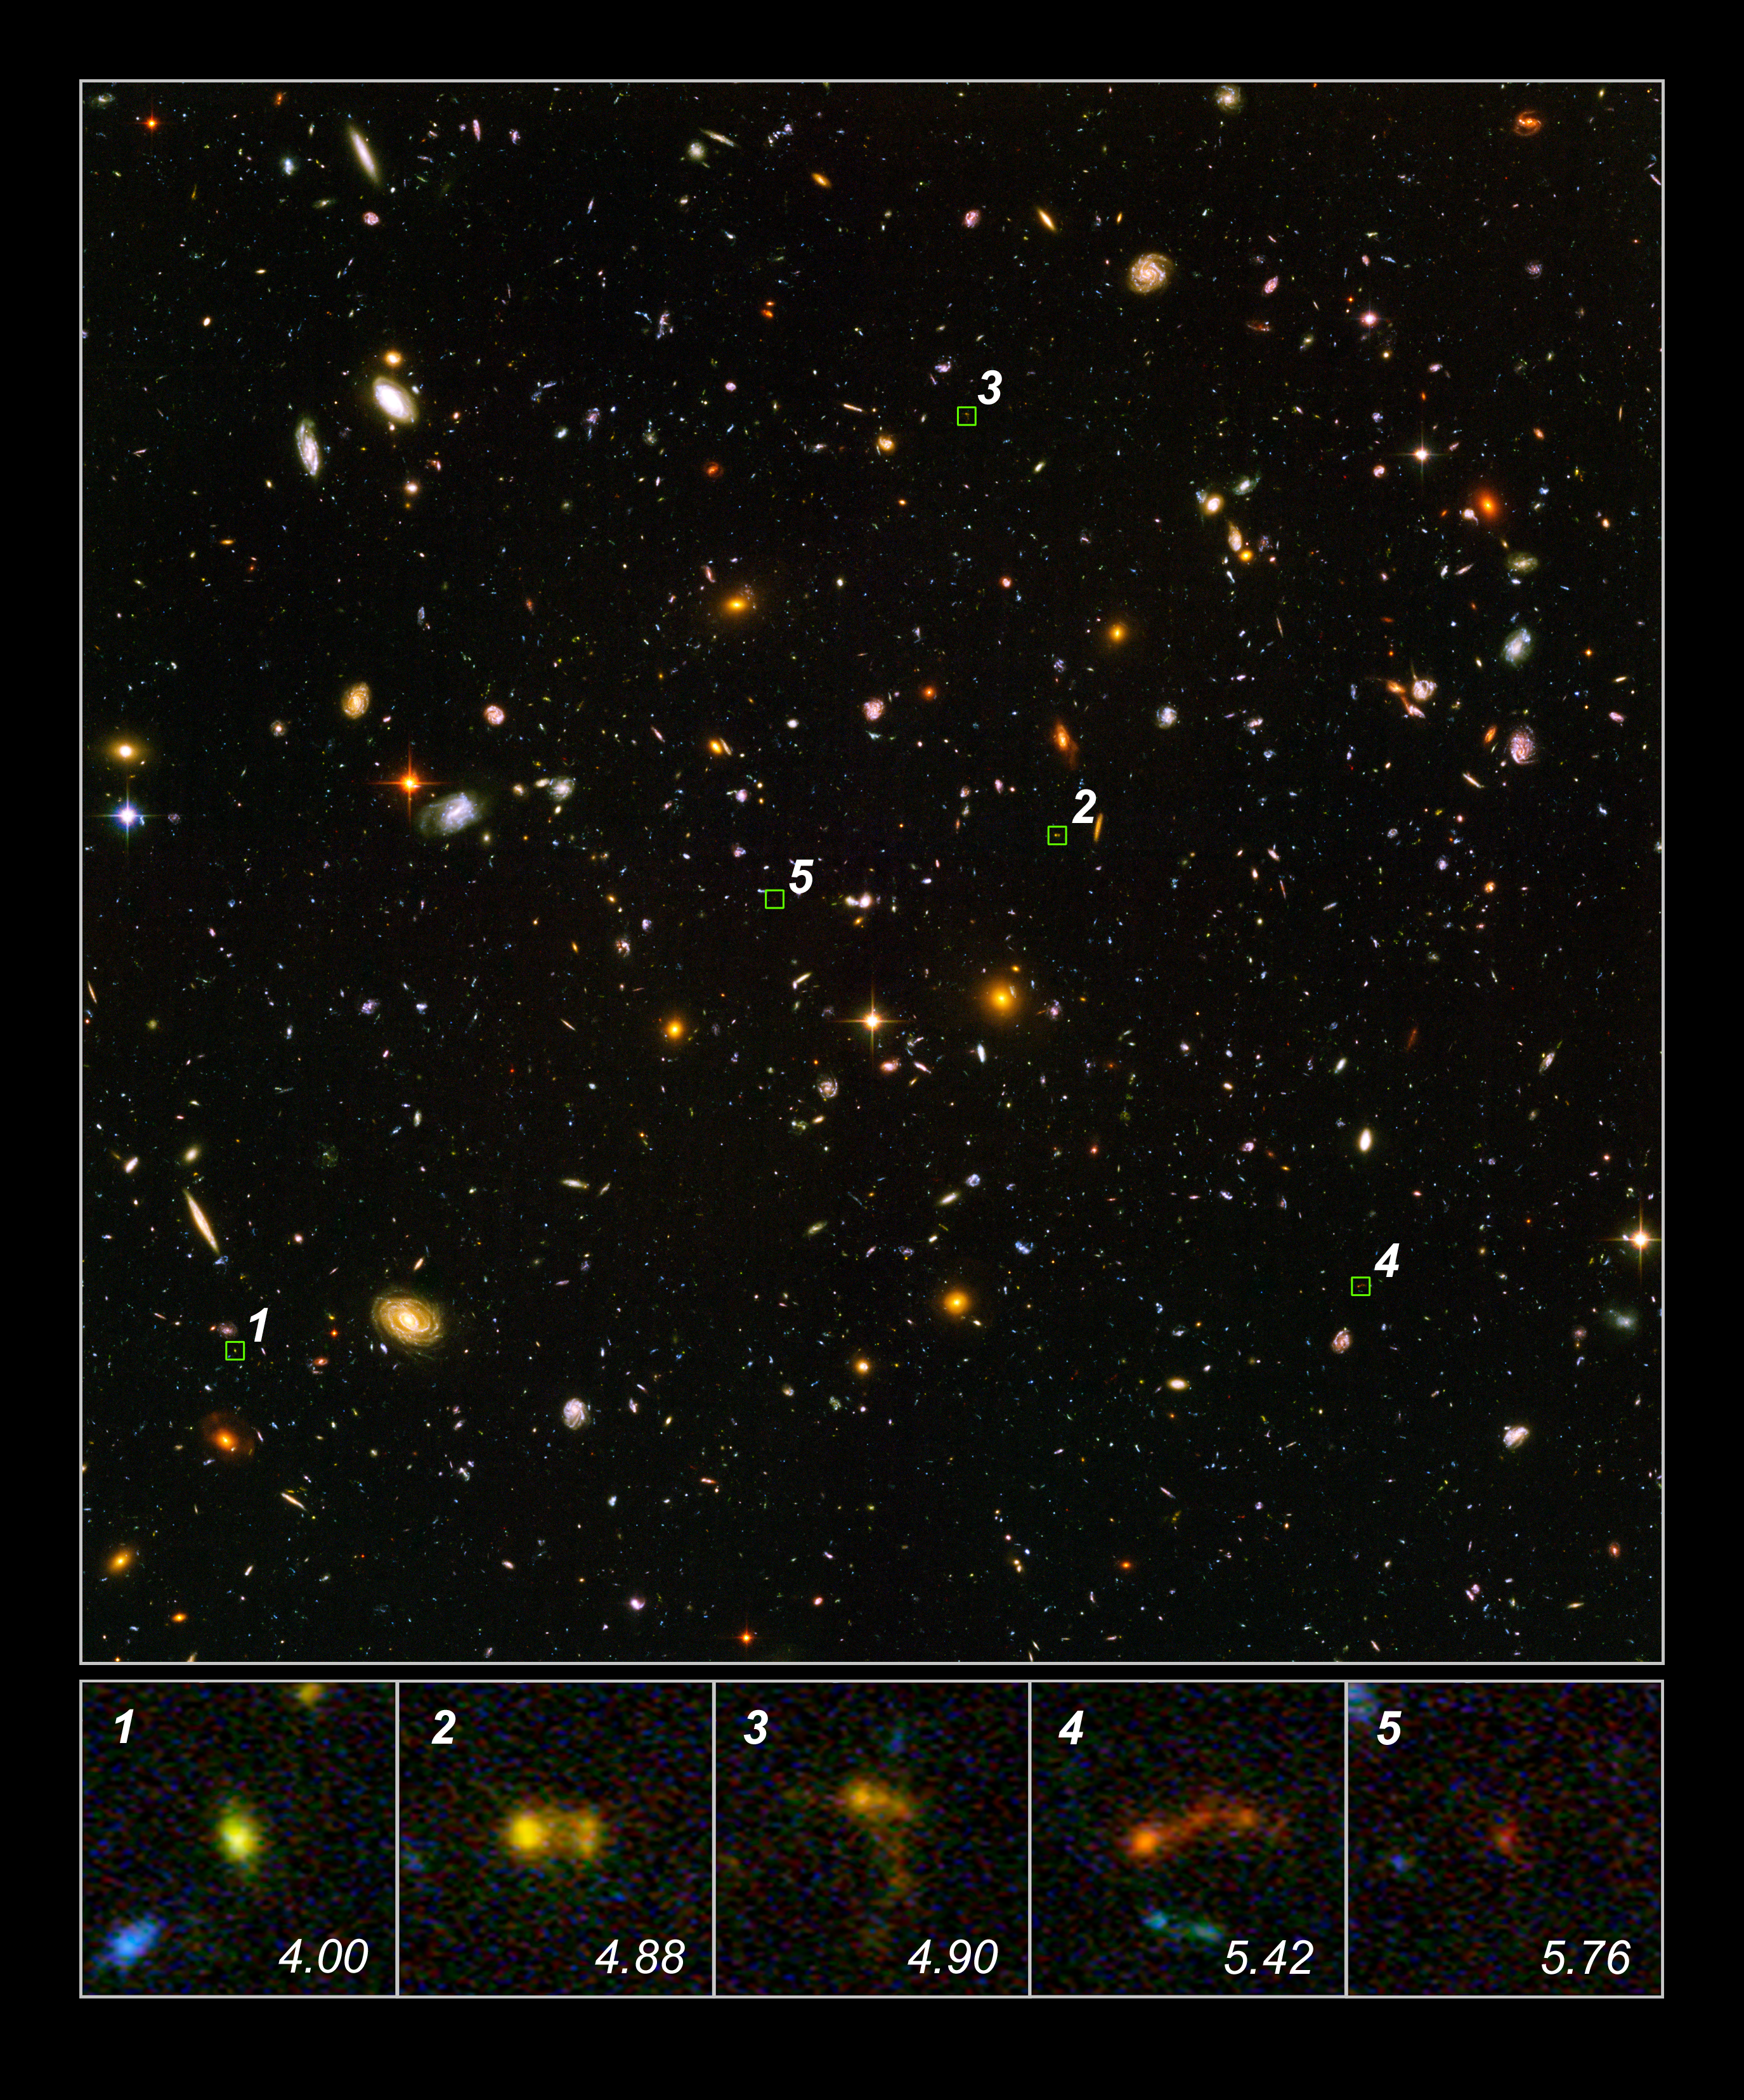

Hubble and Spitzer Uncover Smallest Galaxy Building Blocks

In this image of the Hubble Ultra Deep Field, several objects are identified as the faintest, most compact galaxies ever observed in the distant Universe. They are so far away that we see them as they looked less than one billion years after the Big Bang. Blazing with the brilliance of millions of stars, each of the newly discovered galaxies is a hundred to a thousand times smaller than our Milky Way Galaxy.

The bottom row of pictures shows several of these clumps (distance expressed in redshift value). Three of the galaxies appear to be slightly disrupted. Rather than being shaped like rounded blobs, they appear stretched into tadpole-like shapes. This is a sign that they may be interacting and merging with neighboring galaxies to form larger structures.

The detection required joint observations between Hubble and NASA's Spitzer Space Telescope. Blue light seen by Hubble shows the presence of young stars. The absence of red light from Spitzer observations conclusively shows that these are truly young galaxies without an earlier generation of stars.

Credit: NASA, ESA, and N. Pirzkal (European Space Agency/STScI)